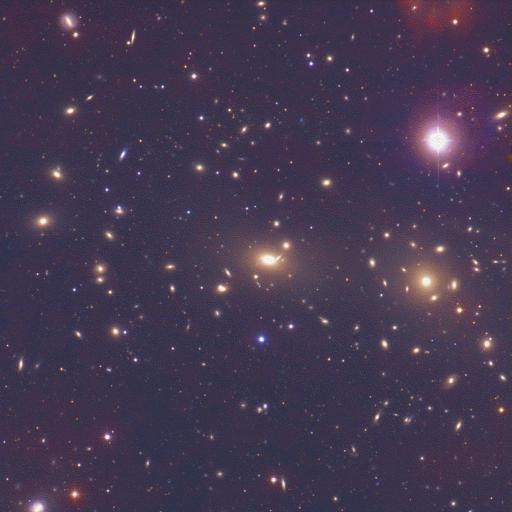

A cluster of galaxies - coma cluster [NOAO]

Image of the Coma Cluster of galaxies

Credit: NASA & ESA